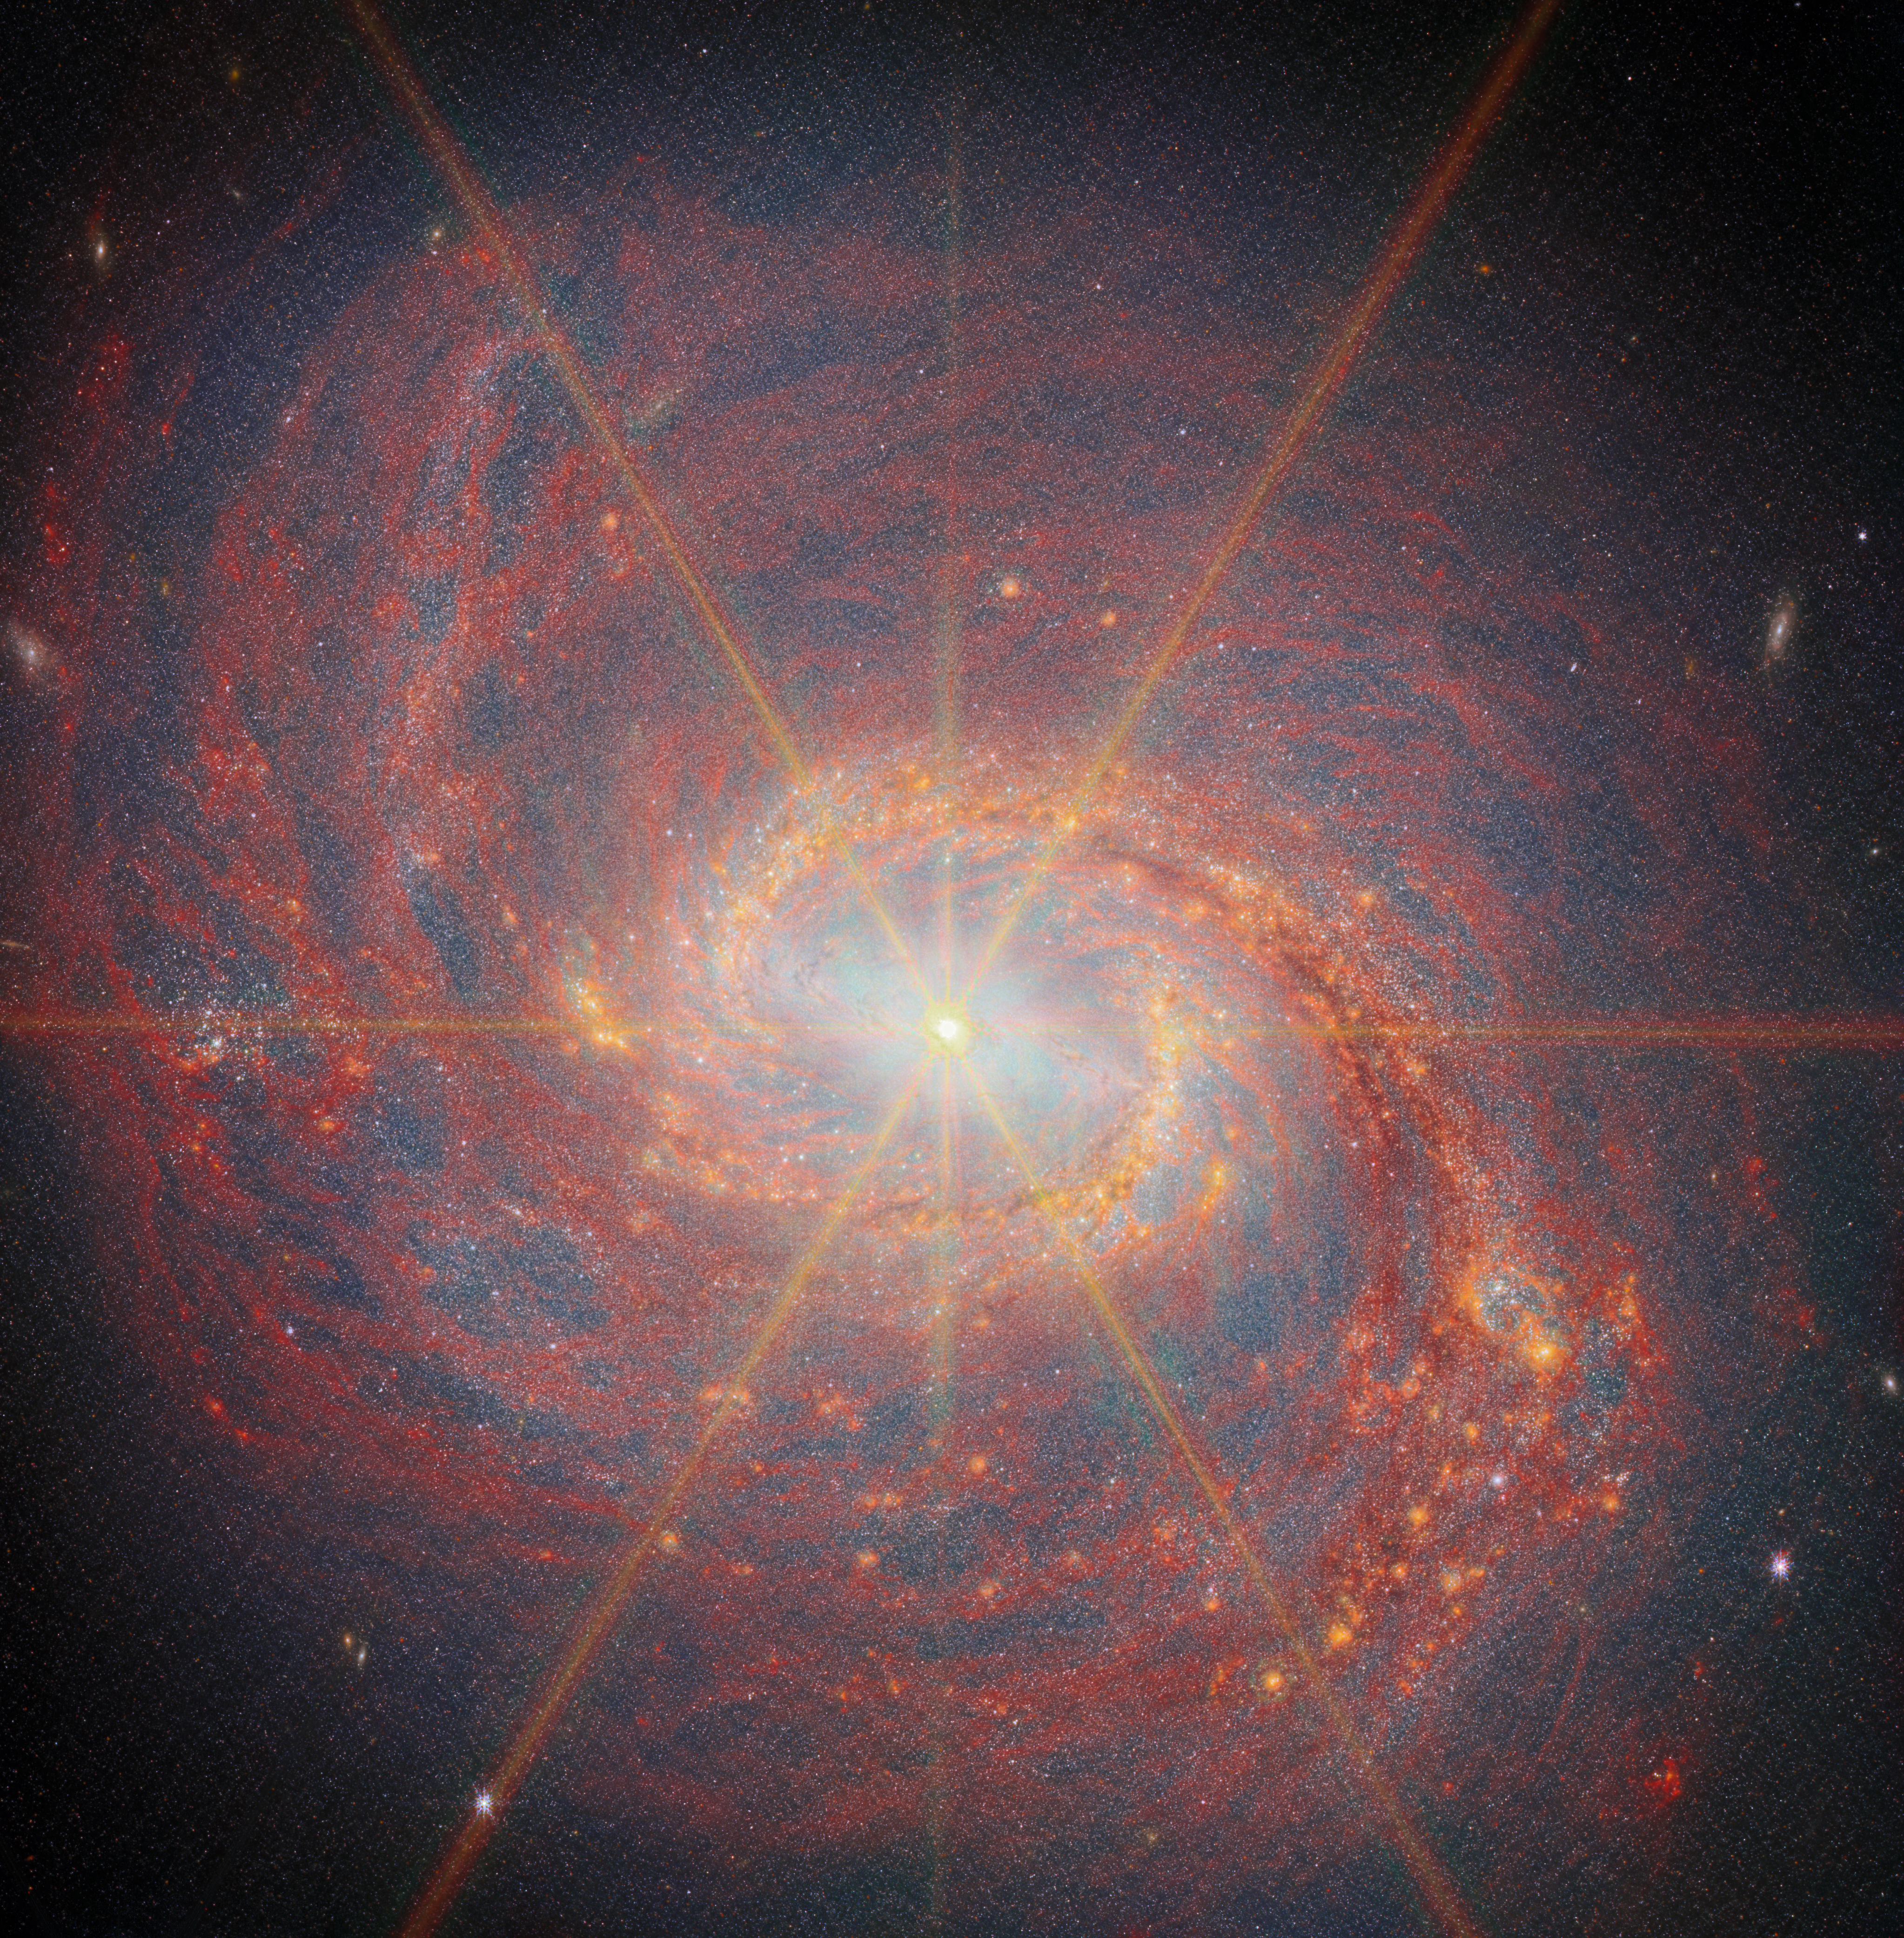

Messier 77 (MIRI + NIRCam)

This latest Picture of the Month from the NASA/ESA/CSA James Webb Space Telescope features Messier 77 (M77), a barred spiral galaxy famous and appreciated among astronomers for its combination of relative proximity and spectacular features to study. It is located 45 million light-years away in the constellation Cetus (The Whale). This new image from Webb highlights its swirling spiral arms, the dust in its disc and its piercingly bright core like never before.

At the heart of M77 is a compact region filled with hot gas that handily outshines the rest of the galaxy put together, even overcoming the light-gathering capacity of Webb’s cameras. This is an active galactic nucleus (AGN), and it’s powered by M77’s central supermassive black hole, which is eight million times as massive as our Sun. Gas in the galaxy’s central regions is pulled by the strong gravity into a tight and rapid orbit around the black hole, where it crashes together and heats up, releasing tremendous amounts of radiation.

The bright orange lines appearing to radiate out from the centre of M77 are not actually a feature of the galaxy: they are a type of distortion that arises from the optical design of the telescope. Called diffraction spikes, they are created because the intense light from the unresolved AGN is bent (“diffracted”) very slightly at the edges of Webb’s hexagonal mirror panels and around one of the struts that hold up its secondary mirror. This distinctive six-plus-two-pointed pattern is the same for any image taken by Webb. For diffraction spikes to appear, the light source has to be very bright and very concentrated, so they’re most often seen on stars. But in some galaxies, as here, the nucleus is bright and compact enough to make diffraction spikes appear as well.

M77 is not just known for its easily visible AGN, but also as a prolific star-forming galaxy. Data in this image from Webb’s Near-Infrared Camera (NIRCam) reveals a bar spanning across the central region, which doesn’t appear in visible-light images of the galaxy. The bar is enclosed by a bright ring, called a starburst ring, formed by the inner ends of M77’s two spiral arms. Starburst regions in galaxies are typified by extremely high star-formation rates. This ring is more than 6 000 light-years across and displays intense and widespread starbursts, visible in this image by the densely concentrated orange bubbles all around the ring. Since M77 is relatively close to Earth, this starburst ring is a very well-studied example of the phenomenon.

Beyond the ring and bar, M77’s spiral arms spin lazily out into the disc of the galaxy and beyond. The arms are the location of much of this new star birth, with dense clumps of gas collapsing to form tightly-packed clusters of stars. NIRCam pinpoints the light from these stars along the spiral arms, as well as capturing the glow that suffuses the galaxy from the billions of stars in its disc. Particularly along the southern spiral arm, NIRCam also traces infrared emission at slightly longer wavelengths from complex molecules including polycyclic aromatic hydrocarbons (PAHs).

As an active spiral galaxy, M77’s disc is filled with gas and dust which is both a product of and fuel for future star formation. NIRCam picks out the glitter of countless stars spread across the disc, and Webb’s Mid-Infrared Instrument (MIRI) fills out the view with the glow of interstellar dust grains emitted at longer wavelengths, shown here in dark red. The dust forms a huge vortex of smoky, swirling filaments with cavities in between.

The data used to create this image are from an observing programme (#3707) that surveyed massive, nearby, star-forming galaxies to create a rich dataset useful for many scientific investigations. As can be seen here, the stunning resolution of Webb’s instruments reveals star clusters and rich reservoirs of gas, which can be used to explore the cycle of star formation, life and death in these and other galaxies.

Credit: ESA/Webb, NASA & CSA, A. Leroy